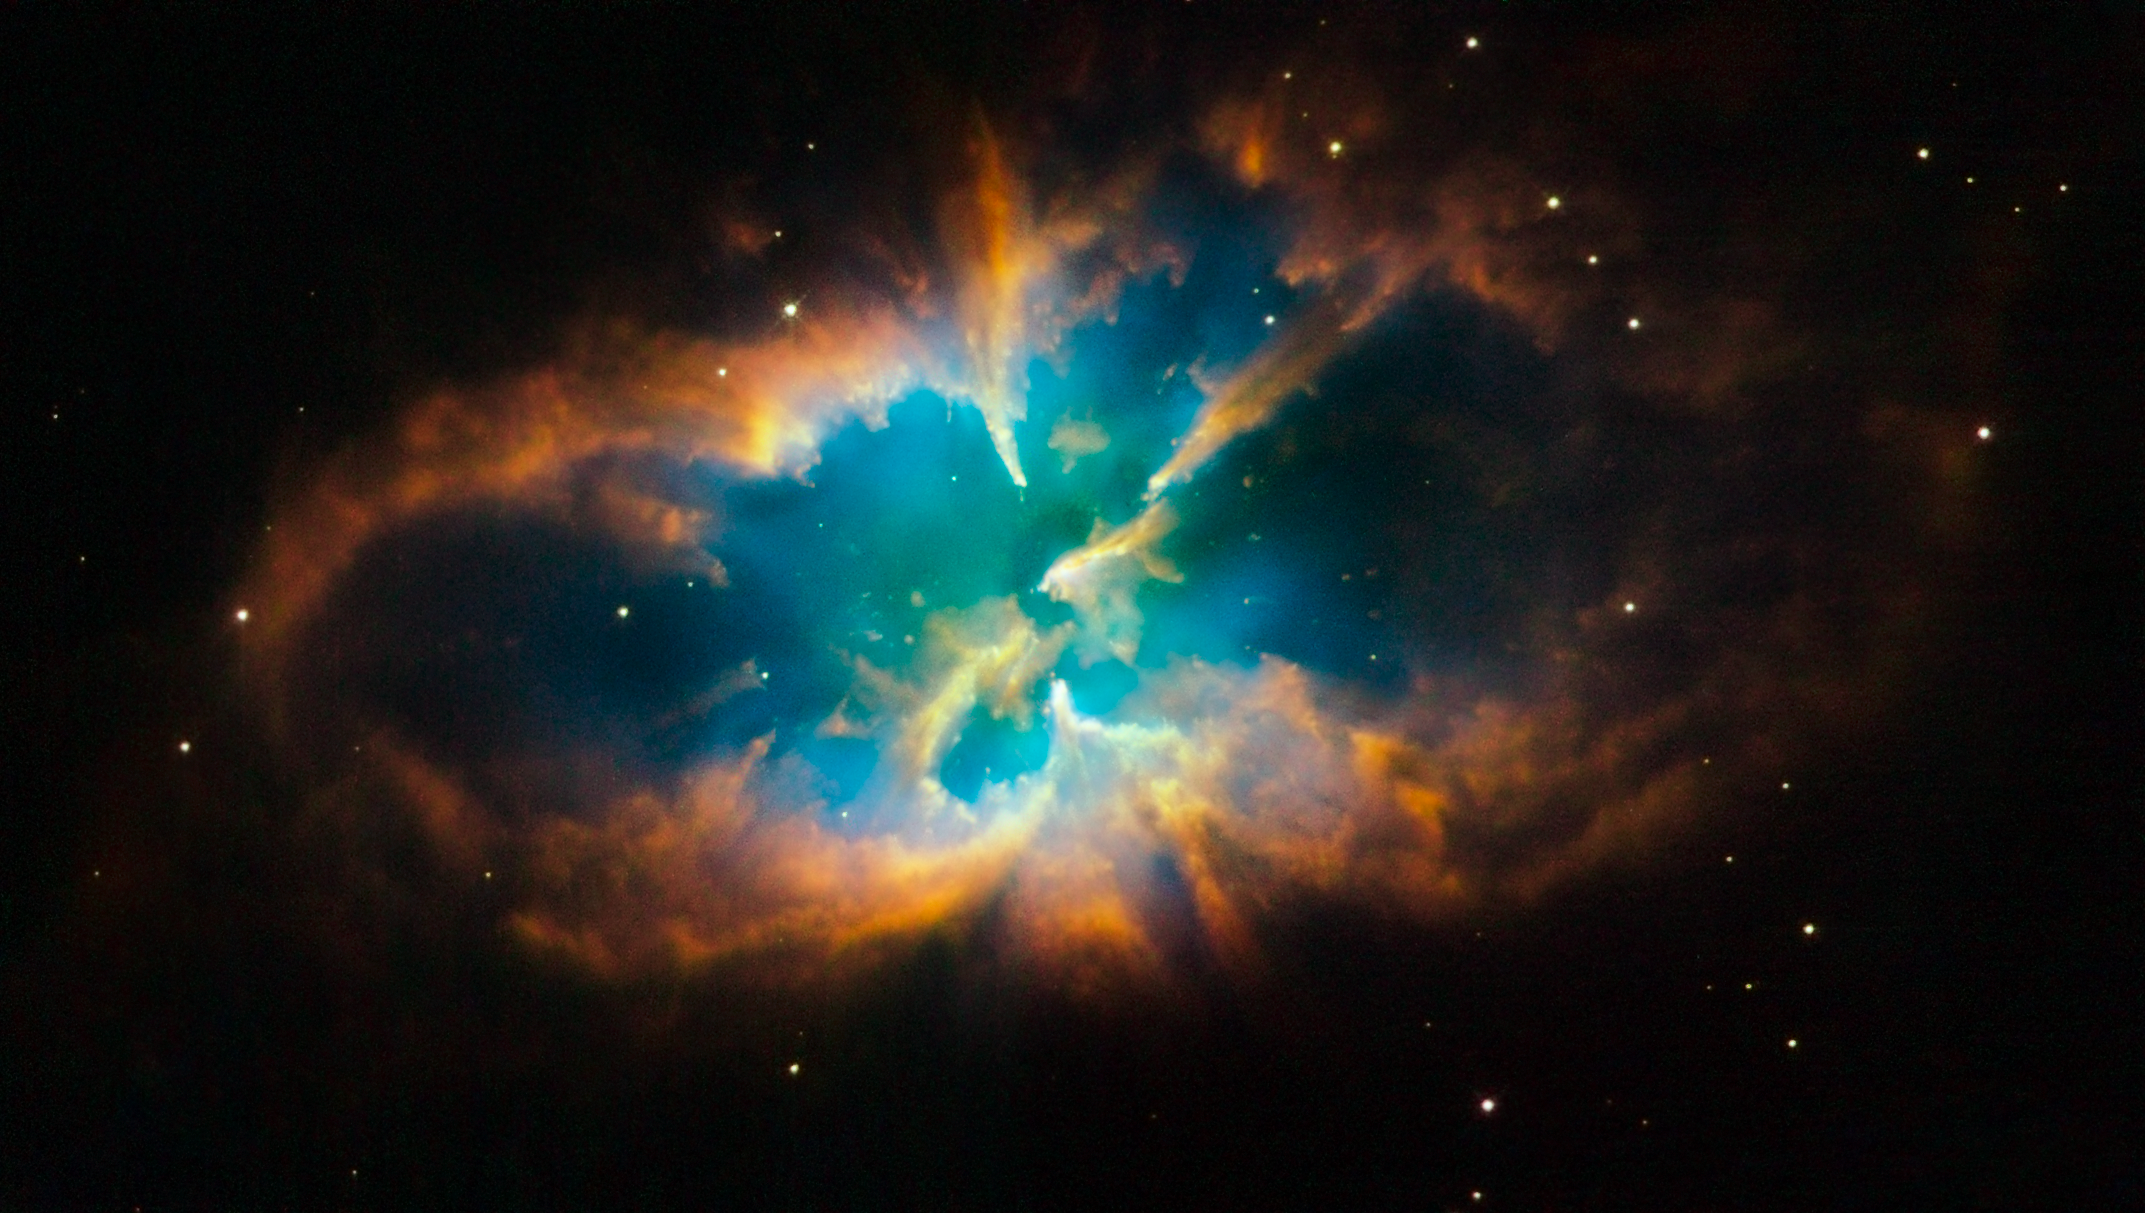

Hubble snaps images of a nebula within a cluster

The unique planetary nebula NGC 2818 is nested inside the open star cluster NGC 2818A. Both the cluster and the nebula reside over 10 000 light-years away, in the southern constellation Pyxis (the Compass).

NGC 2818 is one of very few planetary nebulae in our galaxy located within an open cluster. Open clusters, in general, are loosely bound and they disperse over hundreds of millions of years. Stars that form planetary nebulae typically live for billions of years. Hence, it is rare that an open cluster survives long enough for one of its members to form a planetary nebula. This open cluster is particularly ancient, estimated to be nearly one billion years old.

The spectacular structure of NGC 2818 (also known as PLN 261+8.1) contains the outer layers of a sun-like star that were sent off into interstellar space during the star' s final stages of life. These glowing gaseous shrouds were shed by the star after it ran out of fuel to sustain the nuclear reactions in its core.

Planetary nebulae can have extremely varied structures. NGC 2818 has a complex shape that is difficult to interpret. However, because of its location within the cluster, astronomers have access to information about the nebula, such as its age and distance, that might not otherwise be known.

Planetary nebulae fade away gradually over tens of thousands of years. The hot, remnant stellar core of NGC 2818 will eventually cool off for billions of years as a white dwarf. Our own Sun will undergo a similar process, but not for another 5 billion years or so.

This Hubble image was taken in November 2008 with the Wide Field Planetary Camera 2. The colours in the image represent a range of emissions coming from the clouds of the nebula: red represents nitrogen, green represents hydrogen, and blue represents oxygen.

Credit: NASA, ESA and the Hubble Heritage Team (STScI/AURA)